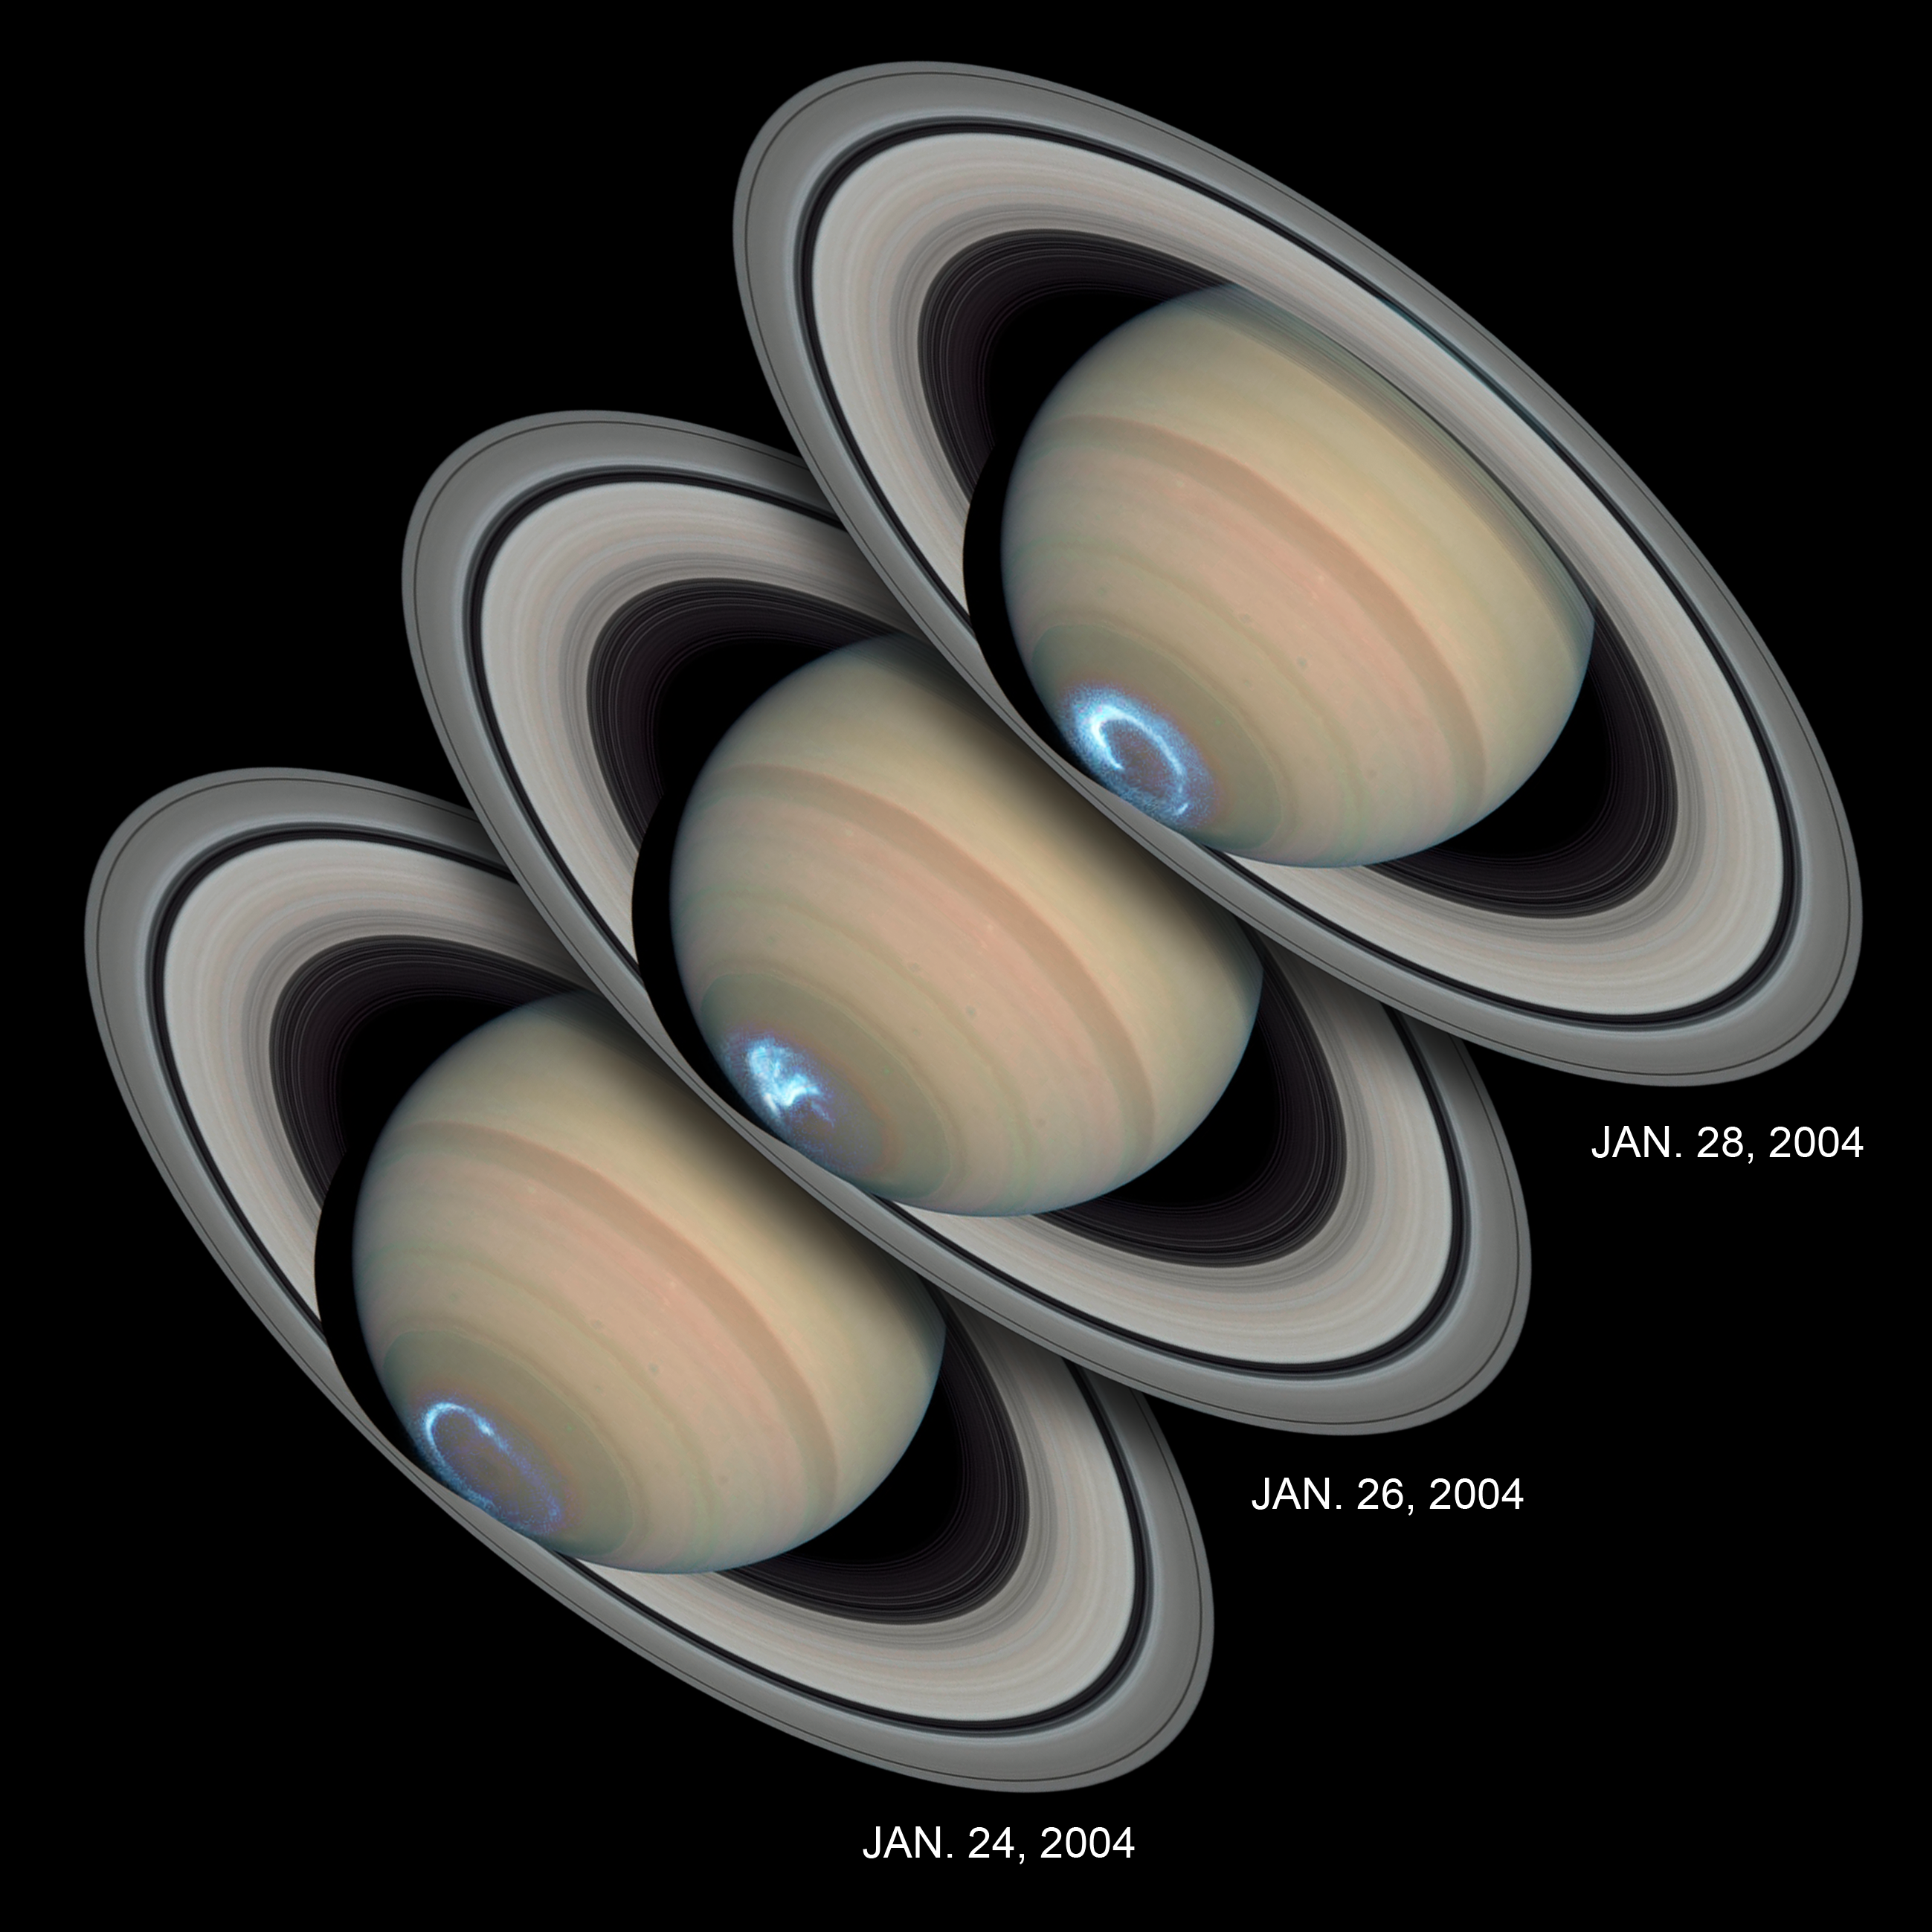

Saturn's dynamic aurorae

These images reveal the dynamic nature of Saturn's aurorae. Viewing the planet's southern polar region for several days, NASA/ESA Hubble Space Telescope snapped a series of photographs of the aurora dancing in the sky. The snapshots show that Saturn's aurorae differ in character from day to day, as they do on Earth, moving around on some days and remaining stationary on others. But compared with Earth, where auroral storms develop in about 10 minutes and may last for a few hours, Saturn's auroral displays always appear bright and may last for several days.

The observations, made by Hubble and the Cassini spacecraft, while en route to the planet, suggest that Saturn's auroral storms are driven mainly by the pressure of the solar wind - a stream of charged particles from the Sun - rather than by the Sun's magnetic field.

The aurora's strong brightening on Jan. 28, 2004 corresponds with the recent arrival of a large disturbance in the solar wind. The image shows that when Saturn's auroras become brighter (and thus more powerful), the ring of light encircling the pole shrinks in diameter.

Seen from space, an aurora appears as a ring of glowing gases circling a planet's polar region. Auroral displays are initiated when charged particles in space collide with a planet's magnetic field. The charged particles are accelerated to high energies and stream into the upper atmosphere. Collisions with the gases in the planet's atmosphere produce flashes of glowing energy in the form of visible, ultraviolet, and infrared light.

Astronomers combined ultraviolet images of Saturn's southern polar region with visible-light images of the planet and its rings to make this picture. The auroral display appears blue because of the glow of ultraviolet light. In reality, the aurora would appear red to an observer at Saturn because of the presence of glowing hydrogen in the atmosphere. On Earth, charged particles from the Sun collide with nitrogen and oxygen in the upper atmosphere, creating auroral displays colored mostly green and blue.

The ultraviolet images were taken on Jan. 24, 26, and 28, 2004 by Hubble's Space Telescope Imaging Spectrograph. Erich Karkoschka of the University of Arizona, USA used the telescope's Advanced Camera for Surveys on March 22, 2004 to take the visible-light images.

Credit: NASA, ESA, J. Clarke (Boston University, USA), and Z. Levay (STScI)